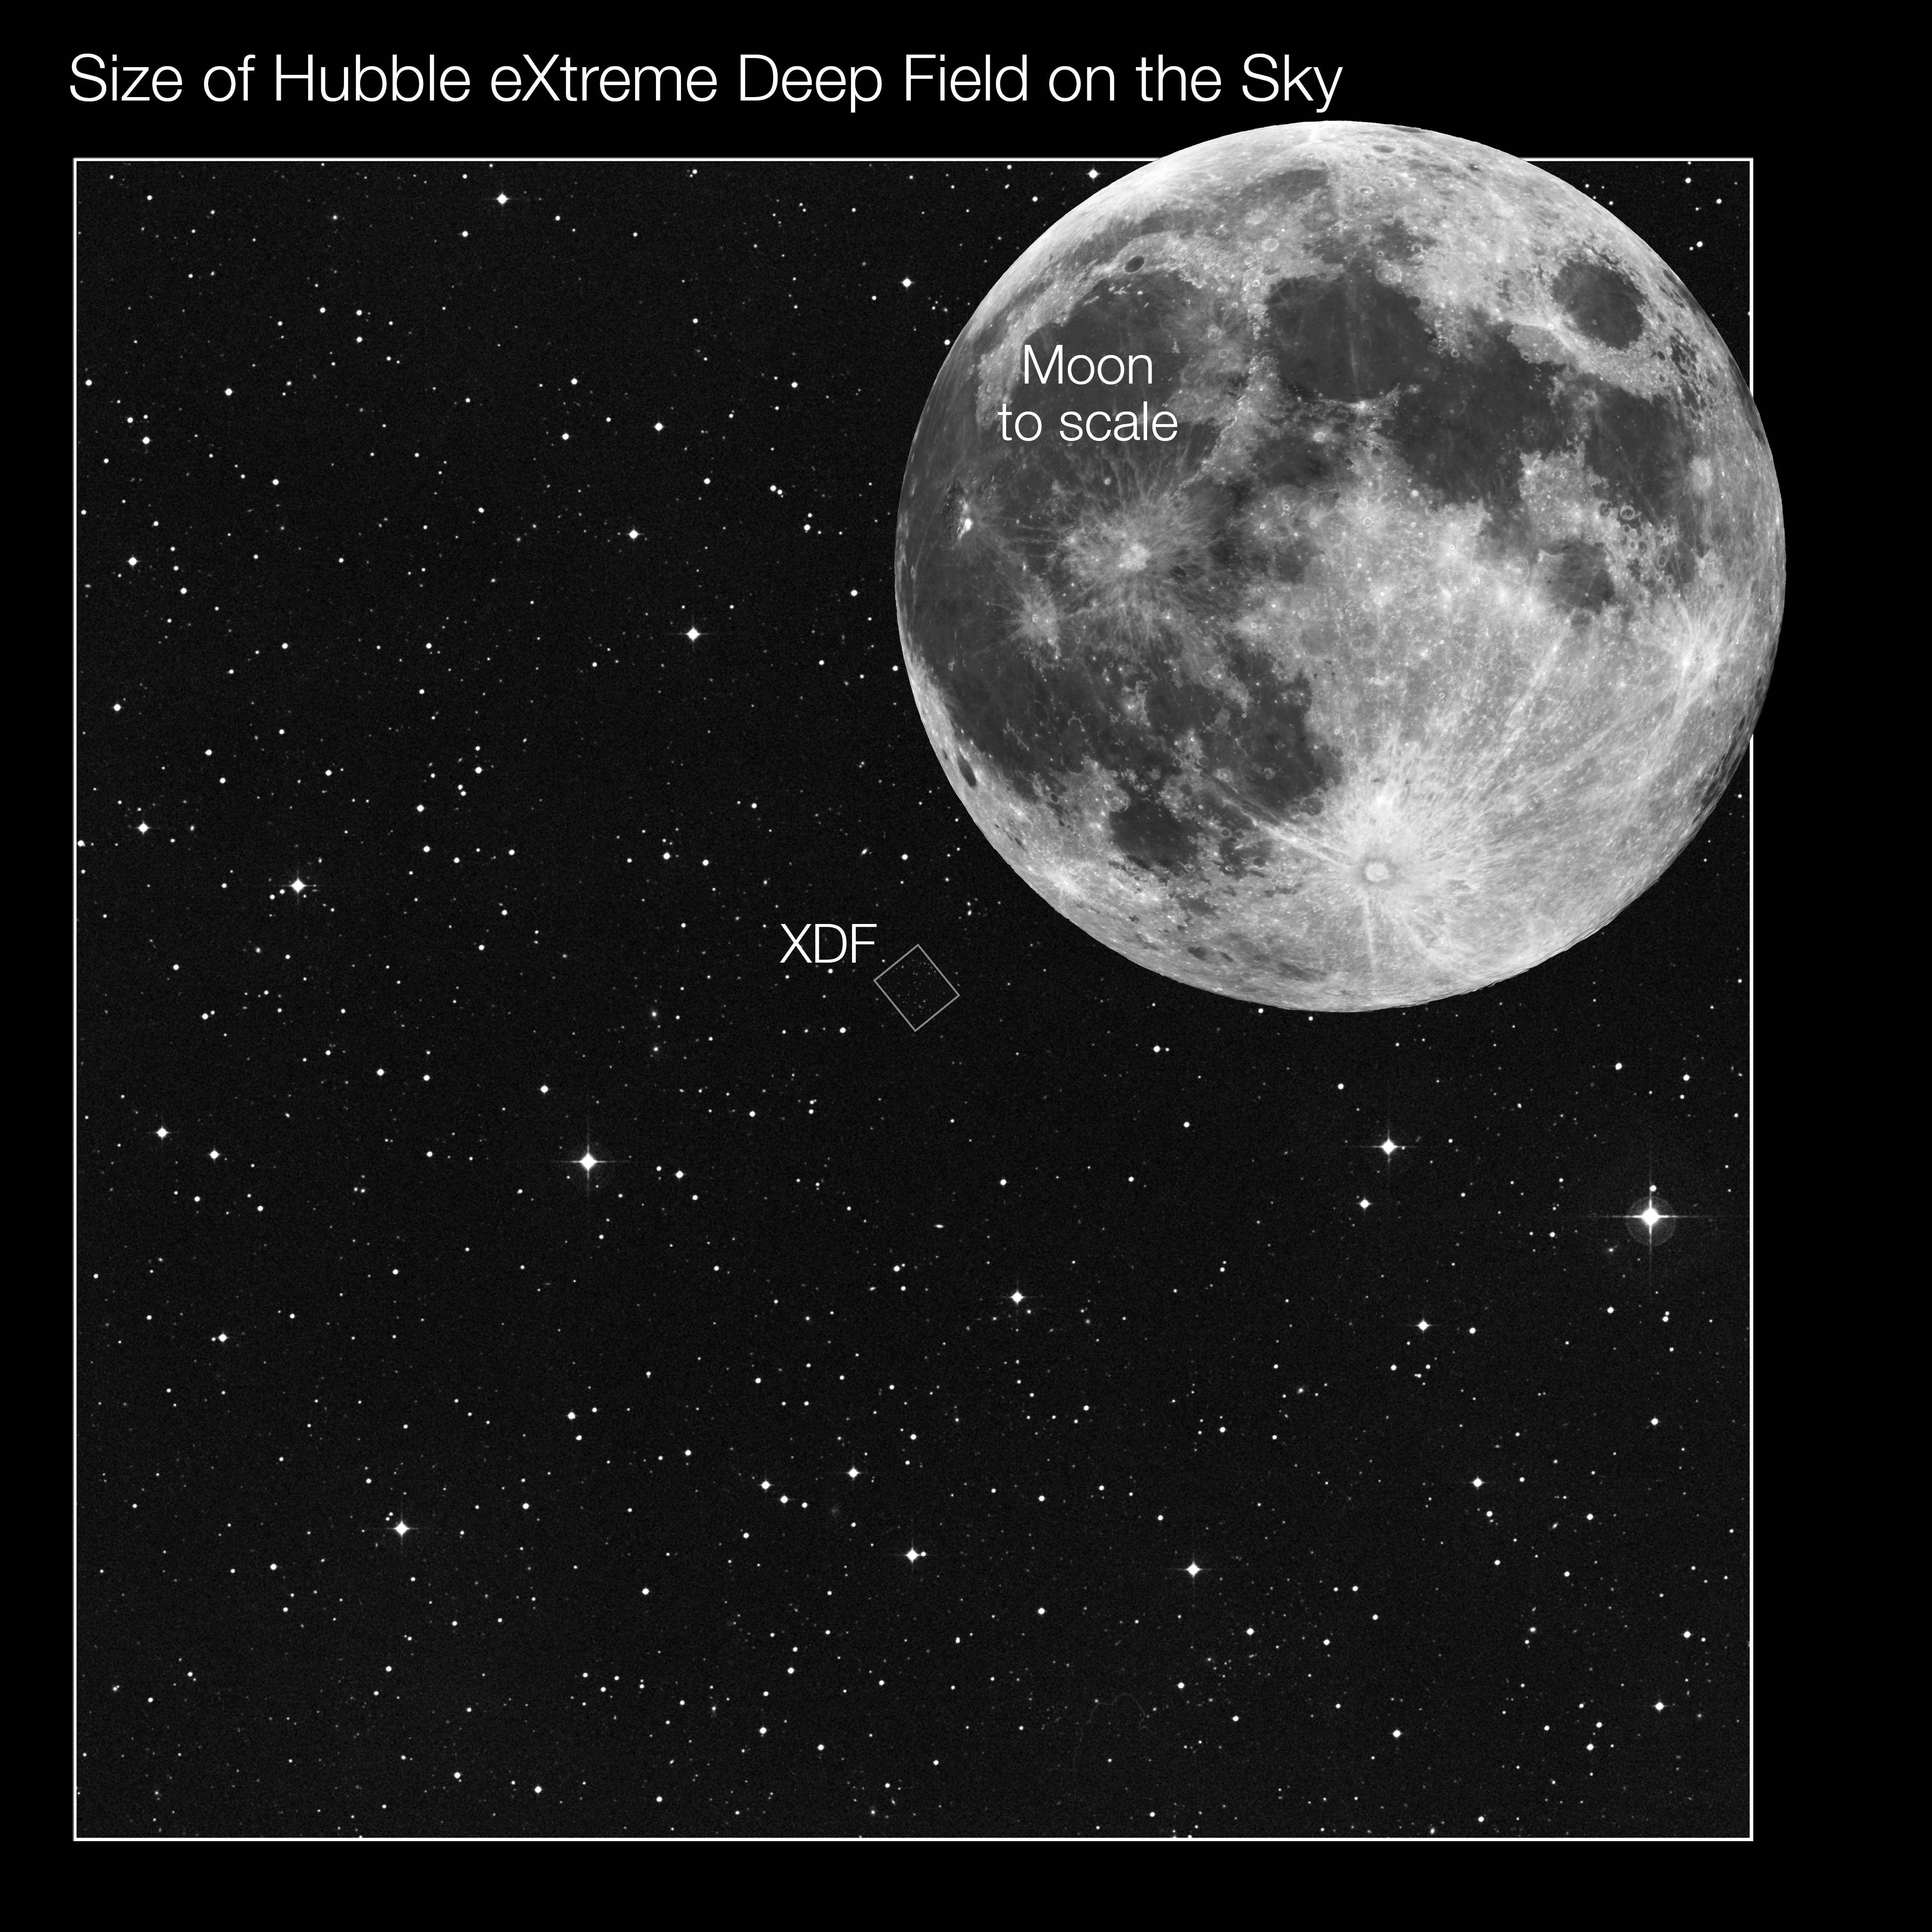

Location and size of the Hubble eXtreme Deep Field (ground-based image)

This image from the Digitzed Sky Survey shows the area around the Hubble eXtreme Deep Field (XDF), located in the constellation of Fornax (The Furnace). The full Moon is shown to scale for comparison. Note that the Moon does not actually pass through Fornax.

Credit: NASA, ESA, Z. Levay (STScI), T. Rector, I. Dell'Antonio/NOAO/AURA/NSF, G. Illingworth, D. Magee, and P. Oesch (University of California, Santa Cruz), R. Bouwens (Leiden University) and the HUDF09 Team